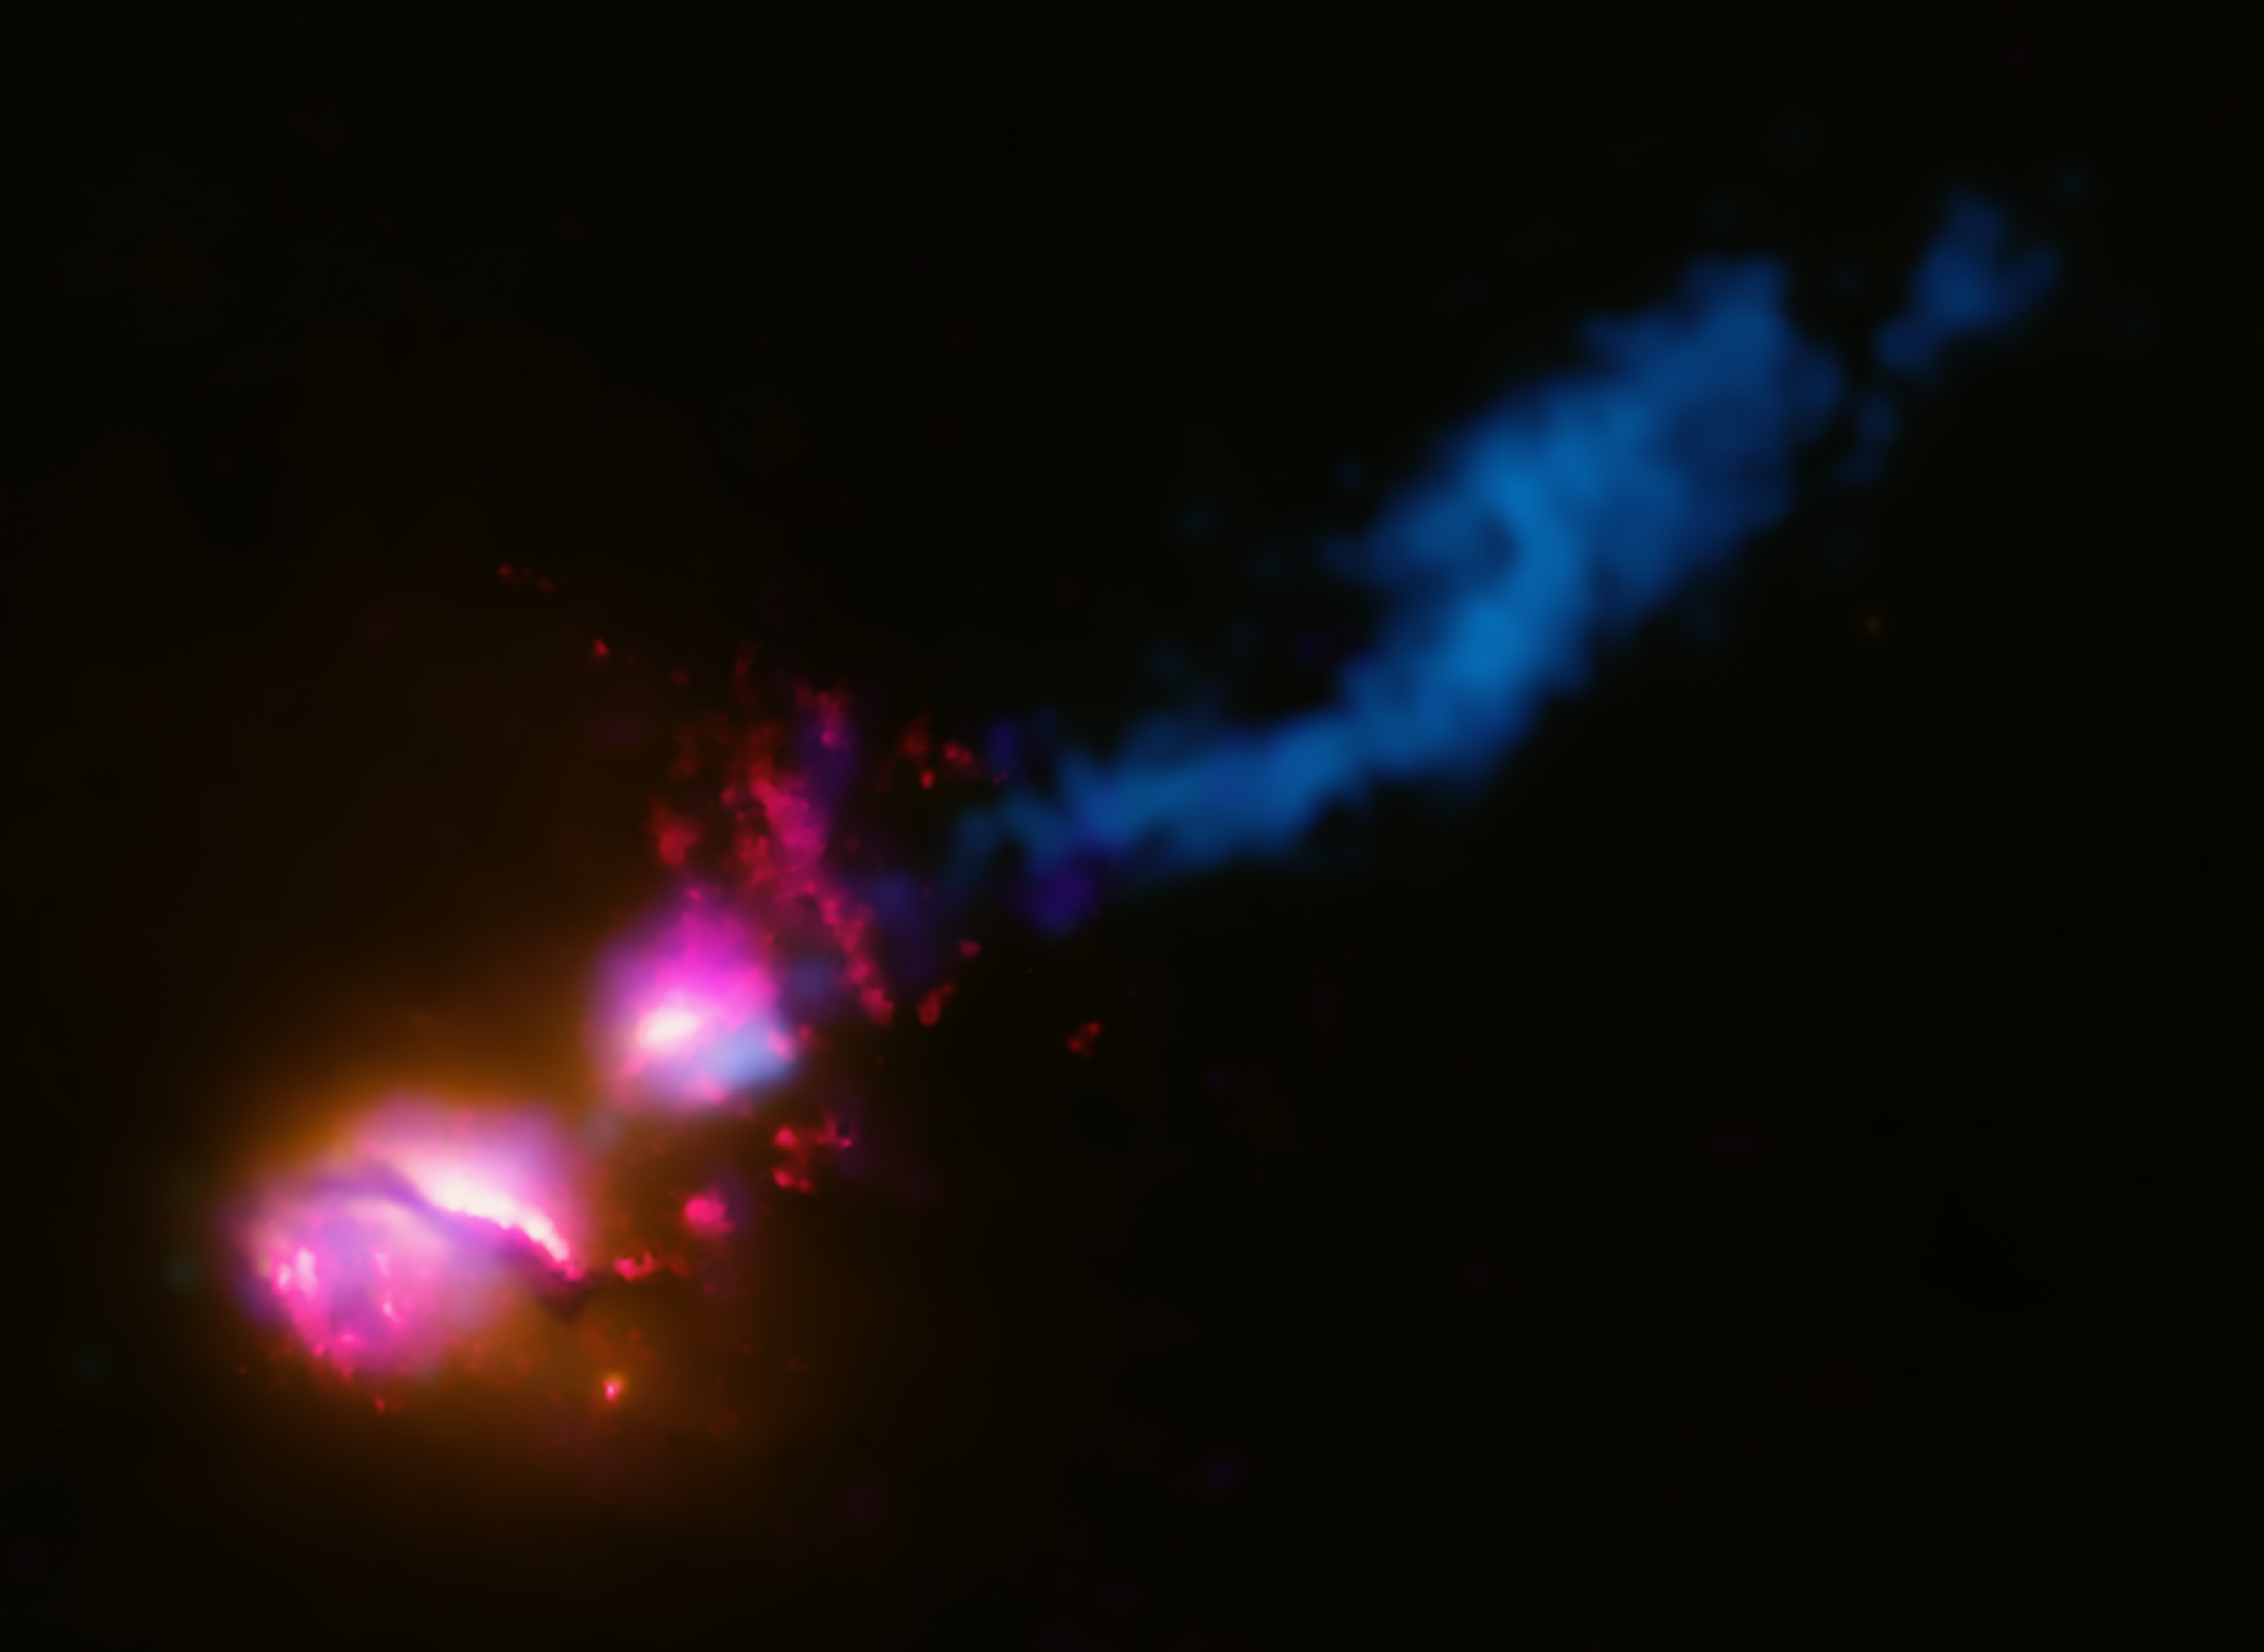

"Death star" galaxy black hole fires at neighboring galaxy

A powerful jet from a supermassive black hole is blasting a nearby galaxy, according to new data from NASA/ESA observatories. This never-before witnessed galactic violence may have a profound effect on planets in the jet's path and trigger a burst of star formation in its destructive wake. Known as 3C 321, the system contains two galaxies in orbit around each other. Data from NASA's Chandra X-ray Observatory show both galaxies contain supermassive black holes at their centres, but the larger galaxy has a jet emanating from the vicinity of its black hole. The smaller galaxy apparently has swung into the path of this jet. This "death star galaxy" was discovered through the combined efforts of both space and ground-based telescopes. NASA's Chandra X-ray Observatory, NASA/ESA Hubble Space Telescope, and NASA's Spitzer Space Telescope were part of the effort. The Very Large Array (VLA) in Socorro, New Mexico (USA), and the Multi-Element Radio Linked Interferometer Network (MERLIN) telescopes in the United Kingdom also were needed for the finding.

Credit: NASA, ESA, D. Evans (Harvard-Smithsonian Center for Astrophysics), [X-ray: NASA/CXC/CfA/D.Evans et al.; Optical/UV: NASA/STScI; Radio: NSF/VLA/CfA/D.Evans et al., STFC/JBO/MERLIN]